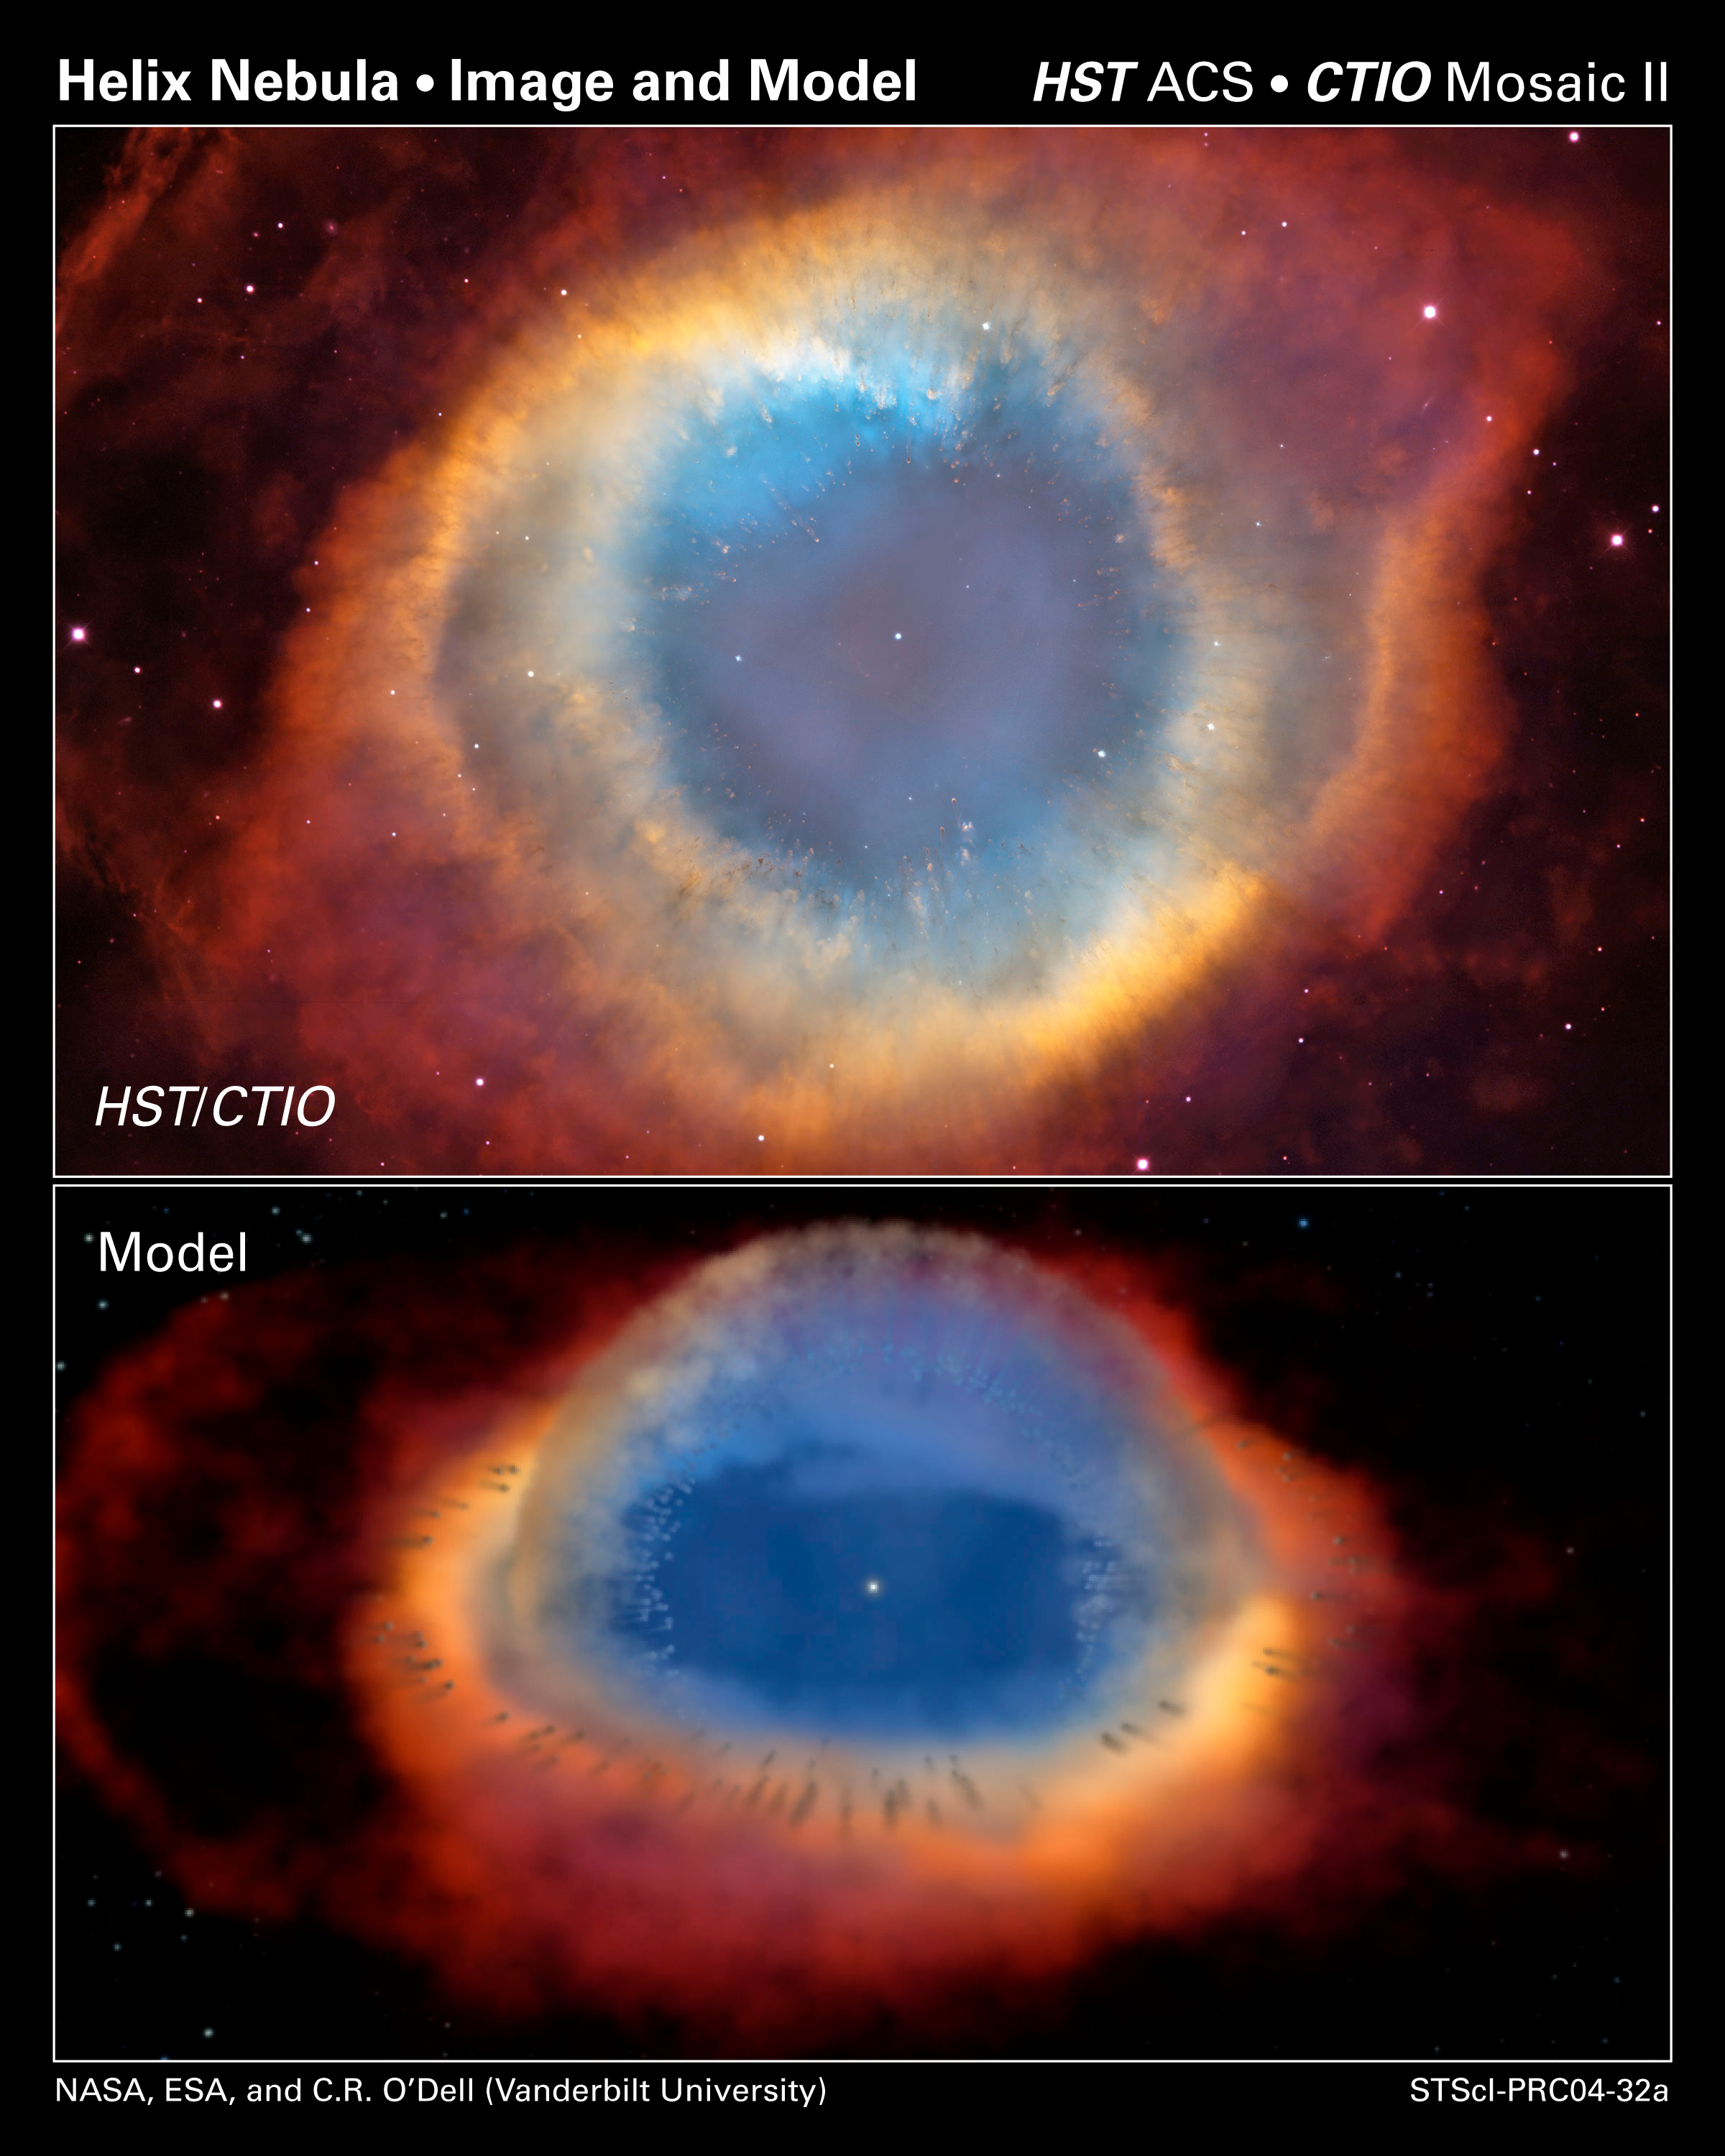

Two views of a Nebula

The top composite image is a view of the colorful Helix Nebula taken with the Advanced Camera for Surveys aboard NASA/ESA Hubble Space Telescope and the Cerro Tololo Inter-American Observatory in Chile. The object is so large that both telescopes were needed to capture a complete view. The Helix resembles a simple doughnut as seen from Earth. But looks can be deceiving. The bottom illustration shows how the Helix would appear if viewed from the side. In this illustration, the Helix consists of two gaseous disks nearly perpendicular to each other. The Helix is a planetary nebula, the glowing gaseous envelope expelled by a dying, sun-like star. The illustration was taken from a three-dimensional model of the Helix. A team of astronomers constructed the model, based on observations from several ground- and space-based observatories, including the Hubble telescope's Advanced Camera for Surveys.

Credit: NASA, ESA, C.R. O'Dell (Vanderbilt University), and M. Meixner, P. McCullough, and G. Bacon ( Space Telescope Science Institute)